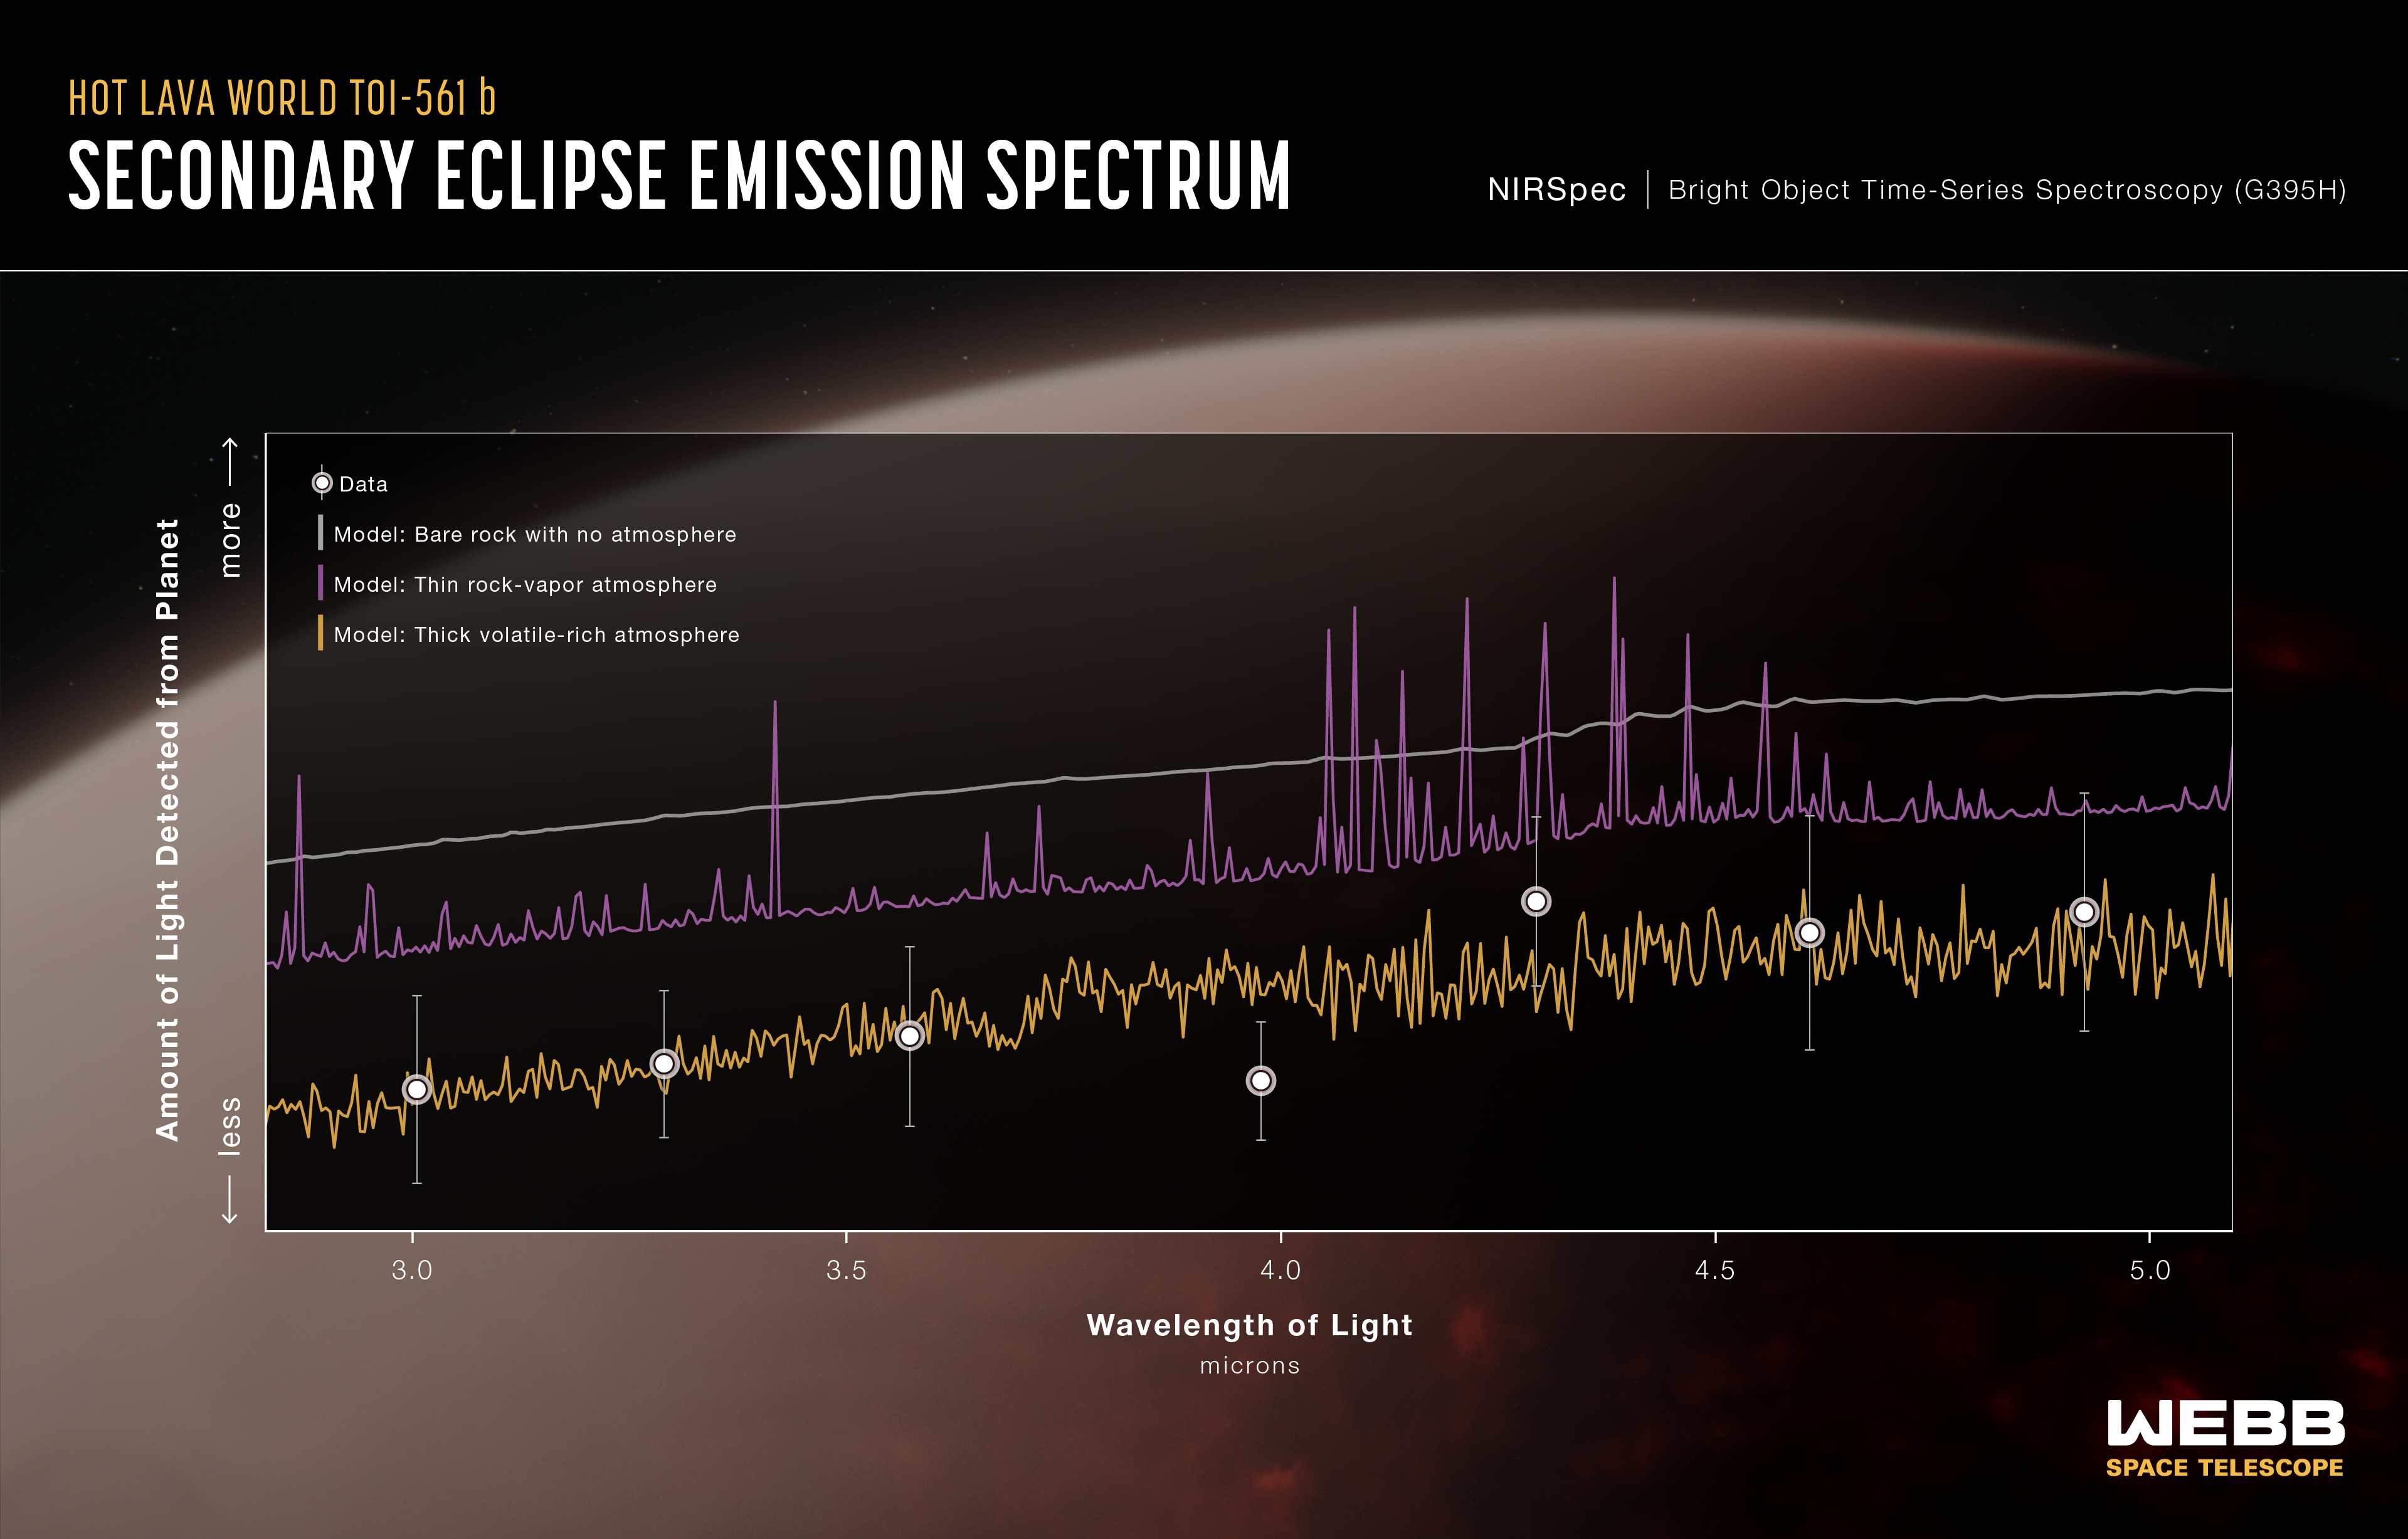

Super-Earth Exoplanet TOI-561 b (NIRSpec Emission Spectrum)

An emission spectrum captured by NIRSpec (the Near-Infrared Spectrograph) on the NASA/ESA/CSA James Webb Space Telescope in May 2024 shows the brightness of different wavelengths of 3- to 5-micron light coming from the ultra-hot super-Earth exoplanet TOI-561 b. Comparisons of the data to theoretical models suggest that the planet is not a bare rock, but is instead surrounded by a volatile-rich atmosphere.

The data (white circles) are based on measurements of the change in brightness of the star-planet system before, during, and after the secondary eclipse, when the planet moves behind the star. Although TOI-561 b is too close to the star to see on its own, the amount of light coming from the planet can be calculated by subtracting the brightness of the star (measured when the planet is behind the star) from the brightness of the planet and star combined (measured when the planet is beside the star). TOI-561 b is thought to be tidally locked, which means that most of the planetary light measured during this observation is coming from the dayside.

Three model spectra are shown for comparison. If TOI-561 b has a dark bare-rock surface with no atmosphere (smooth gray line), or a thin rock-vapour atmosphere (jagged purple line), the dayside of the planet should appear significantly brighter than it actually does. Instead, the data are much more consistent with an atmosphere rich in volatiles like water, oxygen, and carbon dioxide the model shown here assumes an atmosphere that is 100% water vapour).

A thick volatile-rich atmosphere absorbs some of the near-infrared light emitted by the surface, which reduces the amount that reaches the telescope. This makes the planet appear dimmer than it would with no atmosphere or a very thin layer or vapourized rock. A thick atmosphere also acts to distribute heat around the planet via winds, cooling the dayside and heating the nightside.

Webb observed the TOI-561 system continuously for more than 37 hours, capturing nearly four full orbits, including four consecutive secondary eclipses.

Credit: Illustration: NASA, ESA, CSA, Ralf Crawford (STScI), Science: J. Teske (Carnegie Science Earth and Planets Laboratory), A. Piette (University of Birmingham), T. Lichtenberg (Groningen), N. Wallack (Carnegie Science Earth and Planets Laboratory)